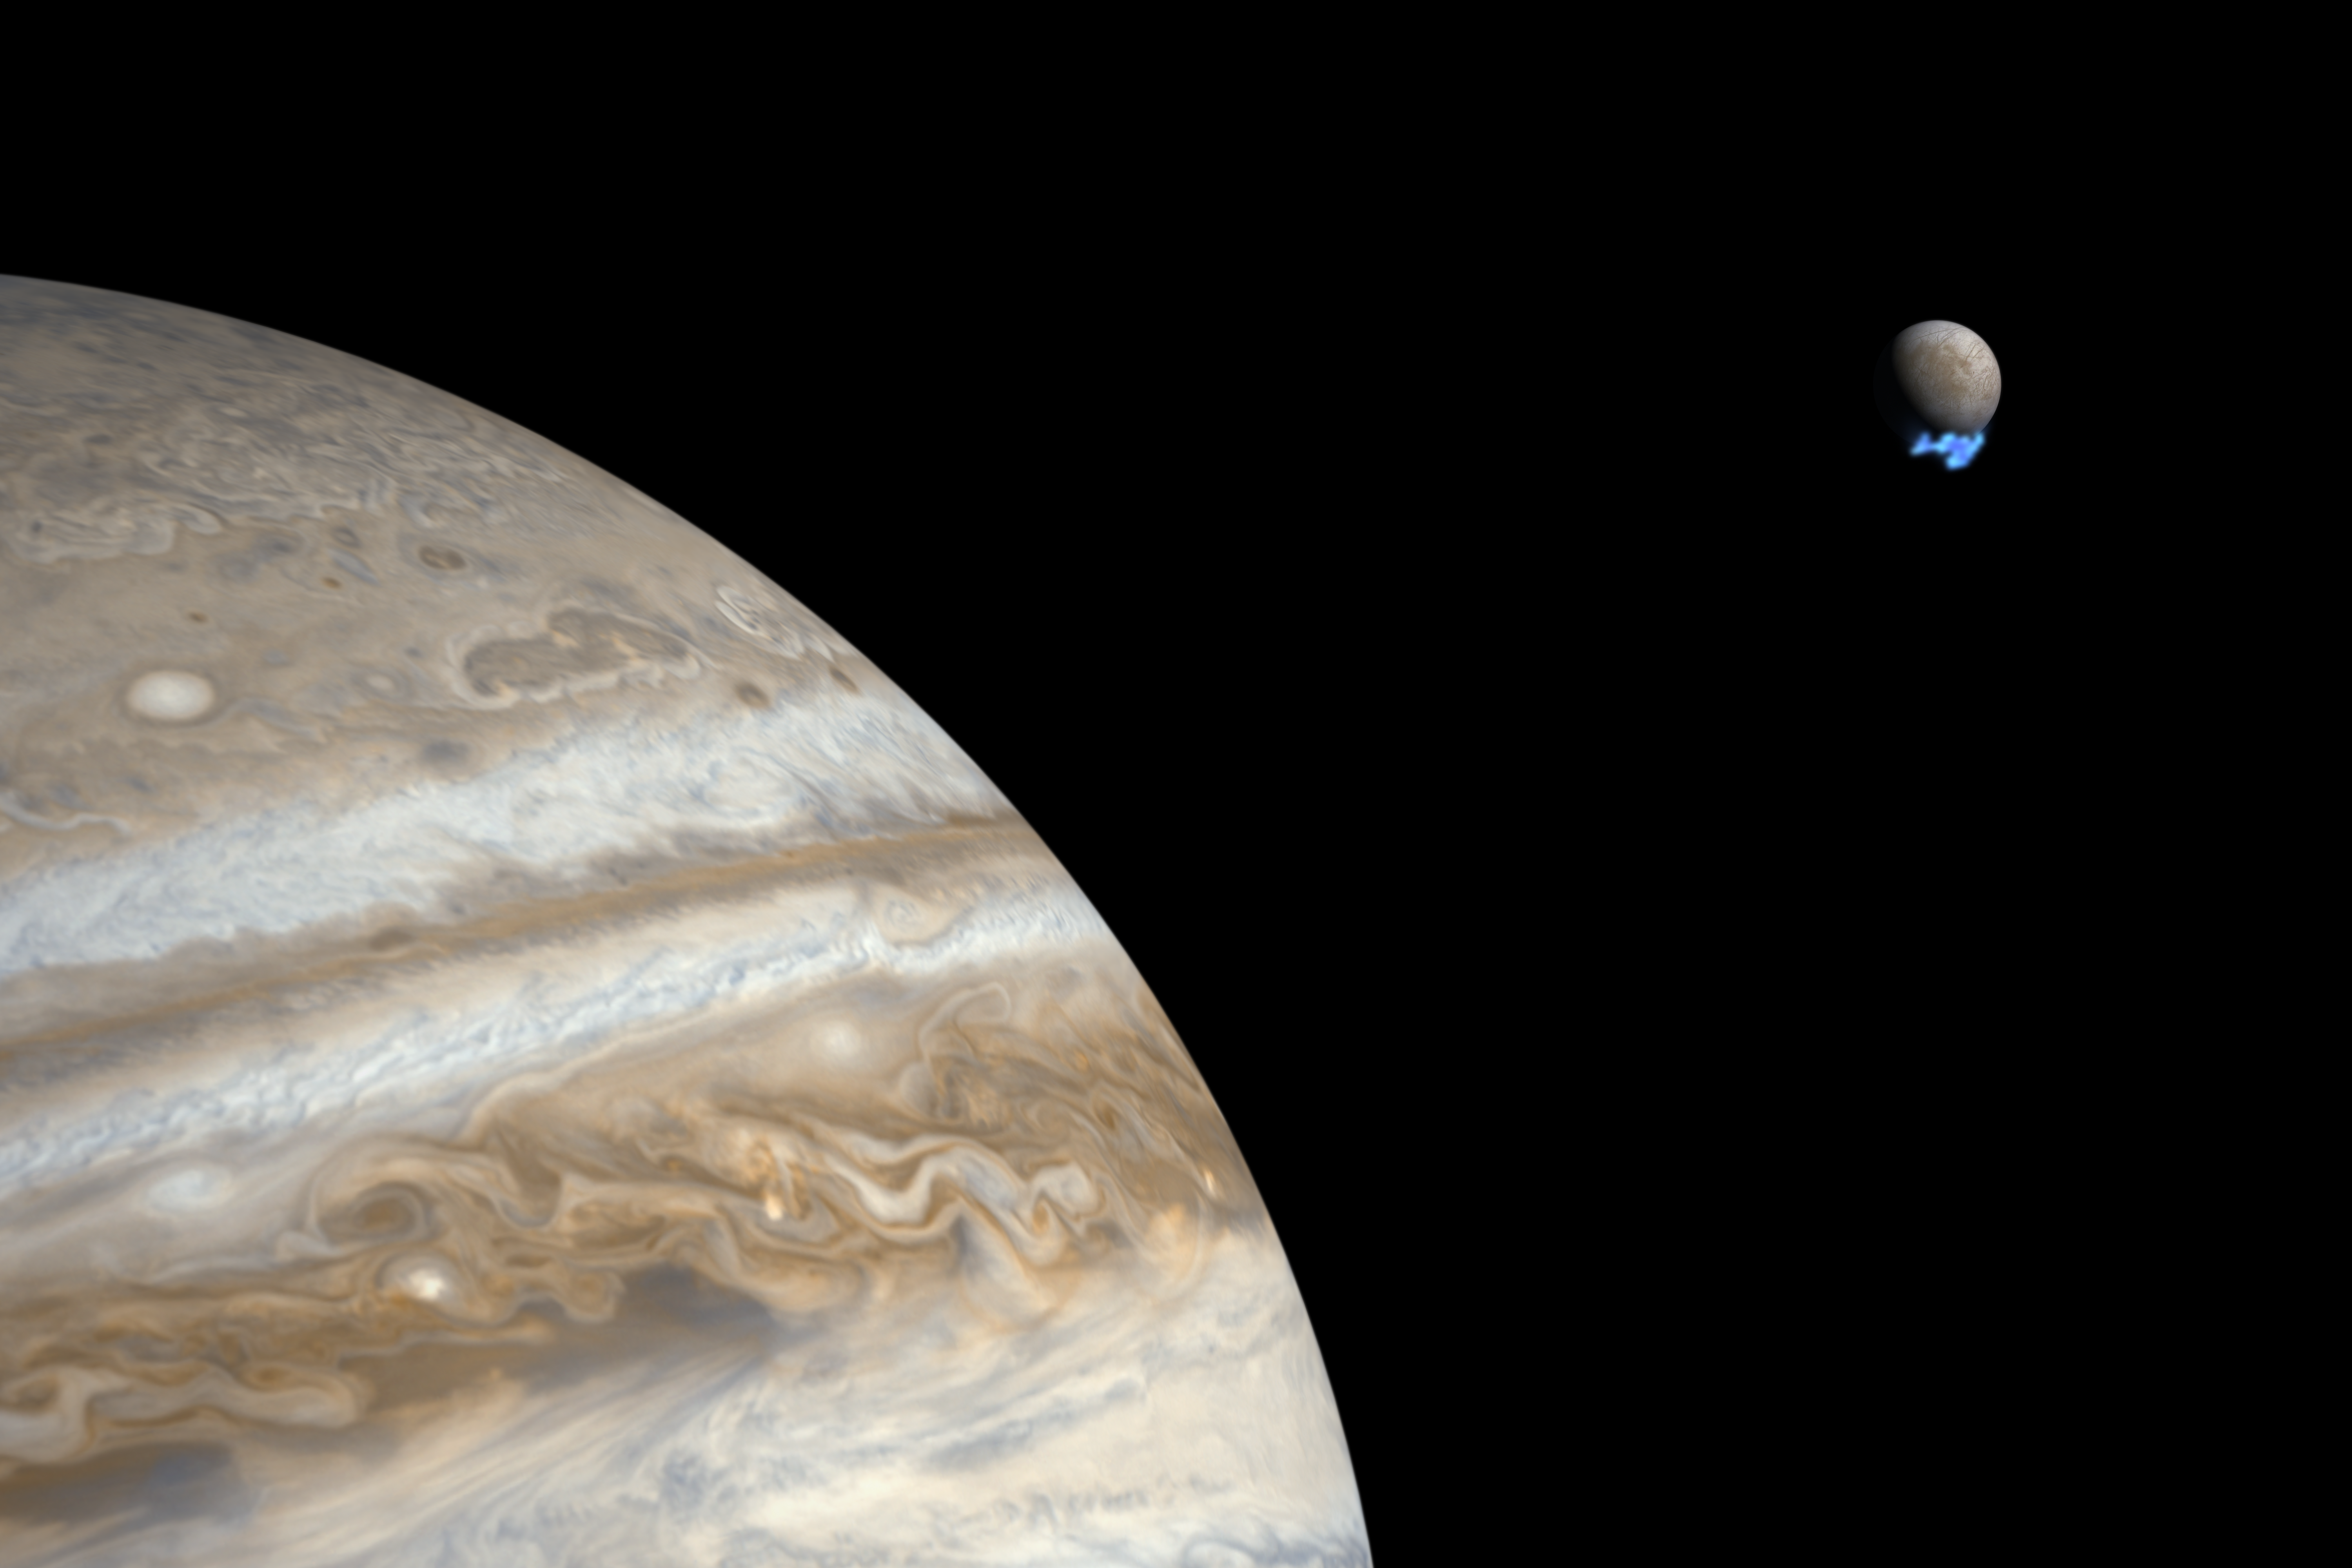

Water vapour plumes on Jupiter’s moon Europa (artist’s impression)

This artist's impression shows Jupiter and its moon Europa using actual Jupiter and Europa images in visible light. The Hubble ultraviolet images showing the faint emission from the water vapour plumes have been superimposed, respecting the size but not the brightness of the plumes.

Credit: NASA, ESA, and M. Kornmesser. Science Credit: NASA, ESA, L. Roth (Southwest Research Institute and University of Cologne, Germany), J. Saur (University of Cologne, Germany), K. Retherford (Southwest Research Institute), D. Strobel and P. Feldman (Johns Hopkins University), M. McGrath (Marshall Space Flight Center), and F. Nimmo (University of California, Santa Cruz)